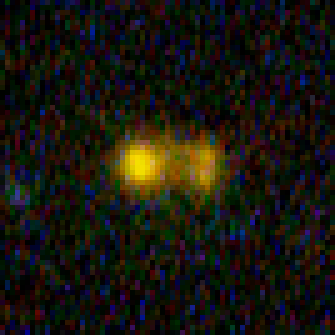

Hubble Building Blocks Galaxy at Redshift 4.88

Building block galaxy at redshift of 4.88 from Hubble Ultra Deep Field image.

Credit: NASA, ESA, and N. Pirzkal (European Space Agency/STScI)